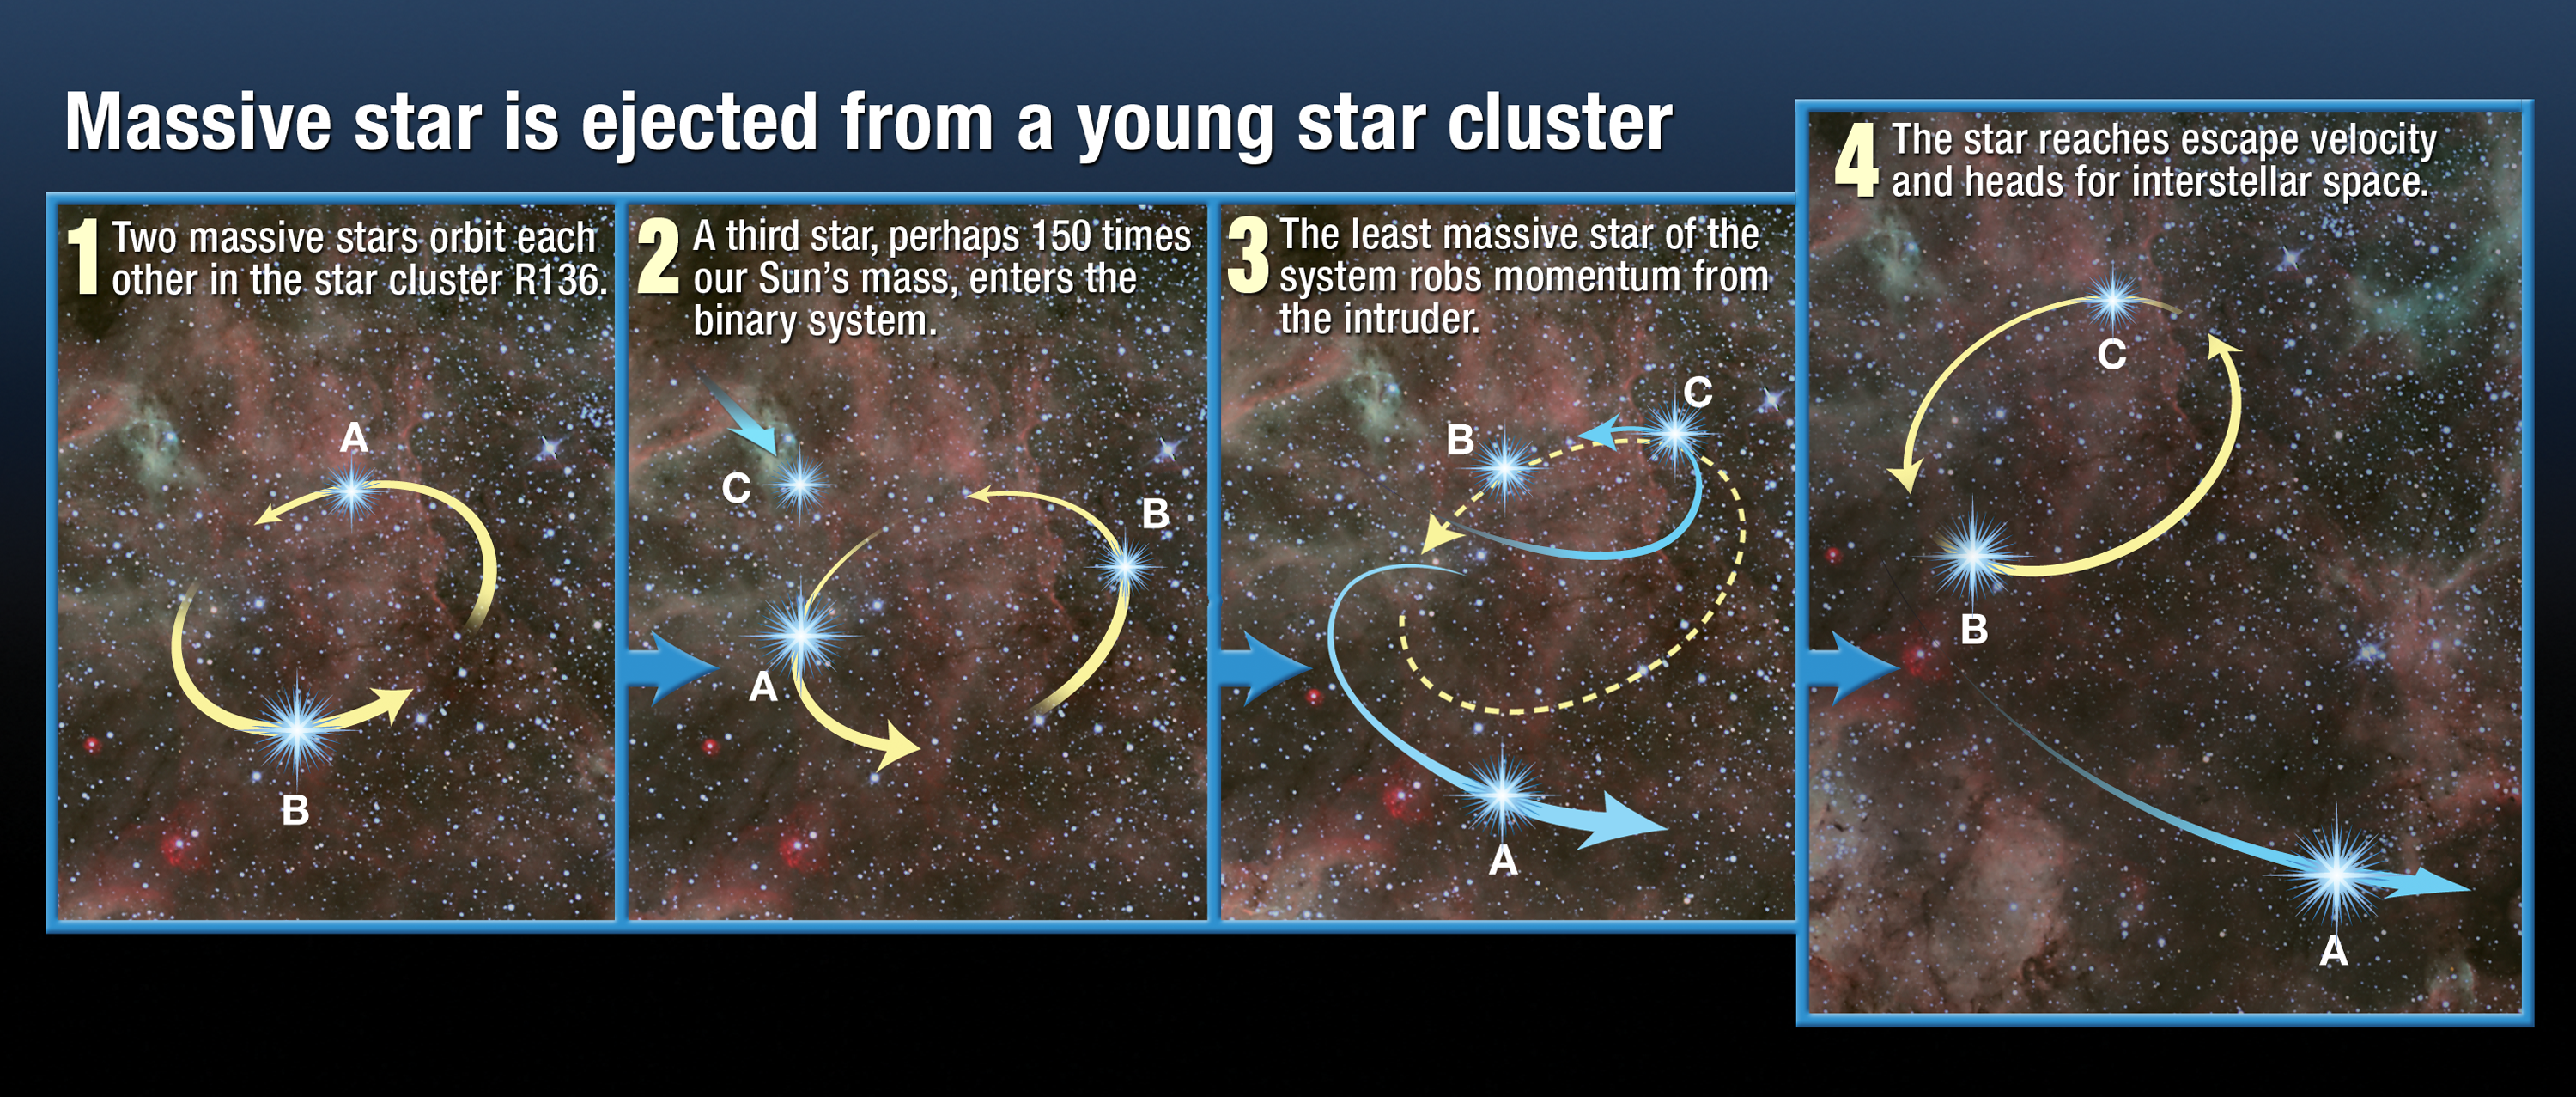

Massive star ejected from young star cluster (artist's impression)

Tantalizing clues from three observatories, including the NASA/ESA Hubble Space Telescope’s newly installed Cosmic Origins Spectrograph (COS), and some old-fashioned detective work, suggest that the star may have travelled about 375 light-years from its suspected home, a giant star cluster called R136.

Credit: NASA, ESA and A. Feild (STScI) Science Credit: NASA, ESA, C. Evans (Royal Observatory Edinburgh), N. Walborn (STScI) and ESO